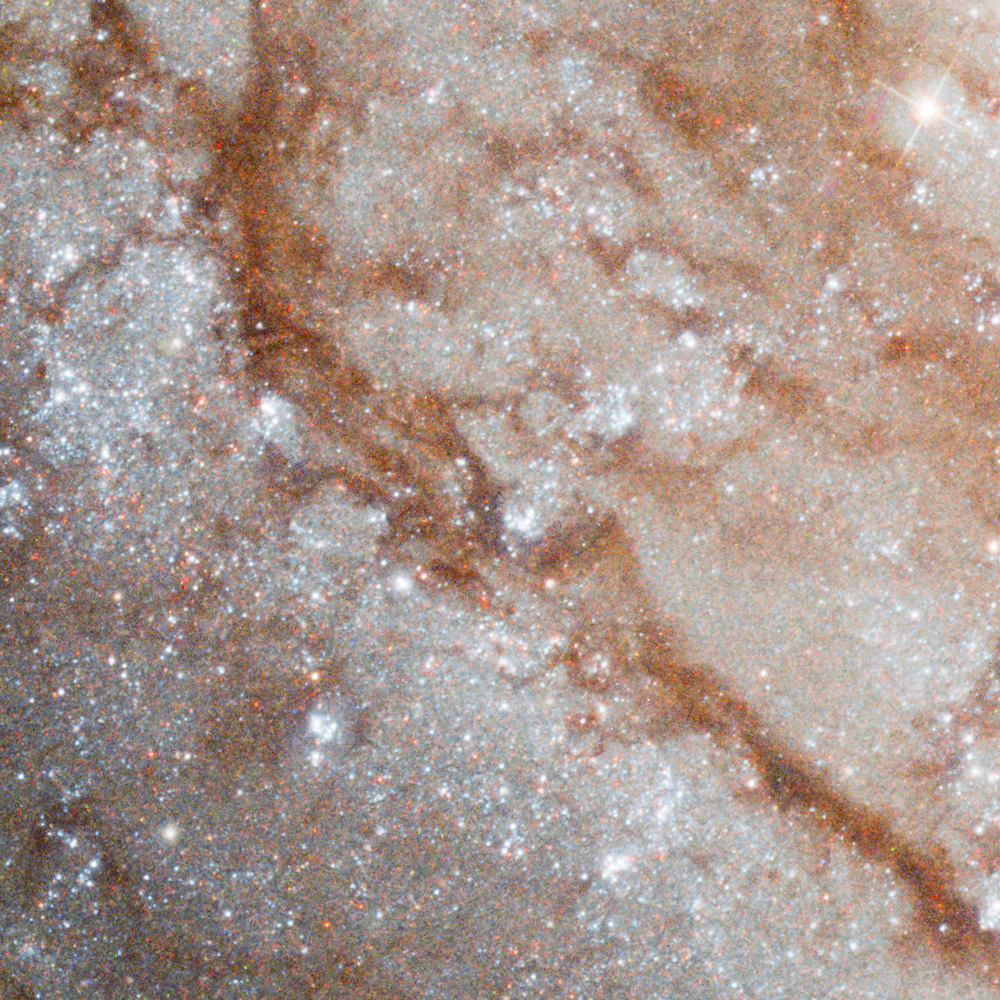

Pinwheel Galaxy close-up 2

Dust lanes in the Pinwheel galaxy. The dust particles scatter blue light the most and therefore colour the light from background stars red. The same effect is seen in sunsets on the Earth.

Credit: Image: European Space Agency & NASA
Acknowledgements:
Project Investigators for the original Hubble data: K.D. Kuntz (GSFC), F. Bresolin (University of Hawaii), J. Trauger (JPL), J. Mould (NOAO), and Y.-H. Chu (University of Illinois, Urbana)
Image processing: Davide De Martin (ESA/Hubble)
CFHT image: Canada-France-Hawaii Telescope/J.-C. Cuillandre/Coelum
NOAO image: George Jacoby, Bruce Bohannan, Mark Hanna/NOAO/AURA/NSF